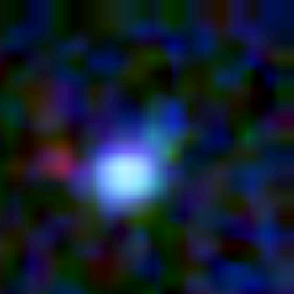

Galaxy building blocks

This is one Proto Galaxy out of a series of 18, taken by the Wide Field Planetary Camera 2.

Credit: Rogier Windhorst and Sam Pascarelle (Arizona State University) and NASA/ESA